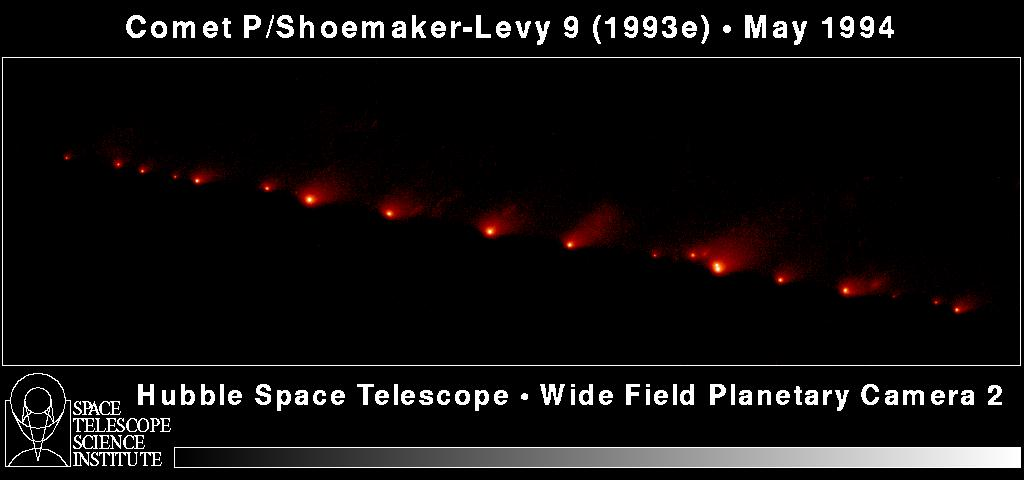

Hubble's Panoramic Picture of Comet P/Shoemaker-Levy 9

A NASA/ESA Hubble Space Telescope (HST) image of comet P/Shoemaker-Levy 9, taken on May 17, 1994, with the Wide Field Planetary Camera-2 (WFPC-2) in wide field mode.

When the comet was observed, its train of 21 icy fragments stretched across 710 thousand miles (1.1 million km) of space, or 3 times the distance between Earth and the Moon. This required 6 WFPC exposures spaced along the comet train to include all the nuclei. The image was taken in red light.

Credit: HA. Weaver, T. ESmith ( Space Telescope Science Institute), and NASA/ESA